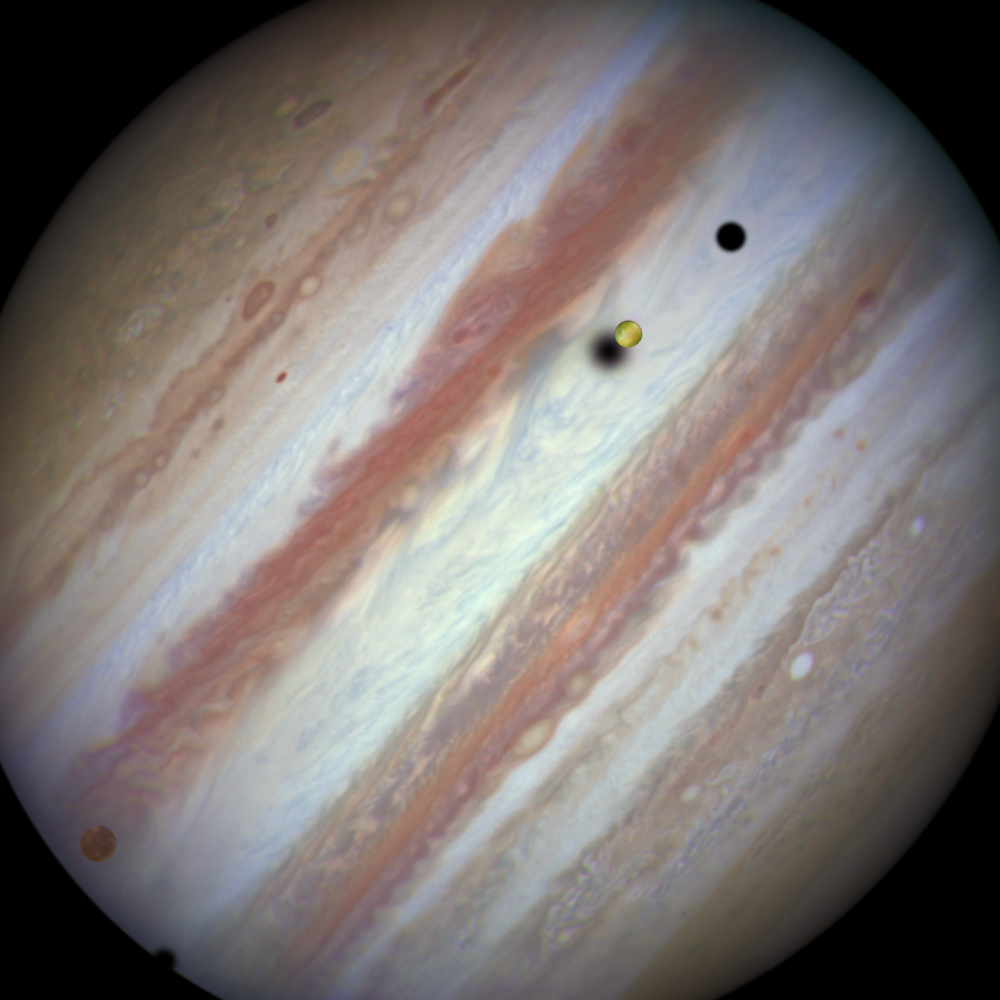

Three moons and their shadows parade across Jupiter — beginning of event

This new NASA/ESA Hubble Space Telescope image captures a rare occurrence as three of Jupiter’s largest moons parade across the giant gas planet’s banded face.

The image shows the Hubble observation at the beginning of the event. On the left is the moon Callisto and on the right, Io. The shadows from Europa, which cannot be seen in the image, Callisto and Io are strung out from left to right.

The movement of the moons is shown in the video created from Hubble stills and an annotated version is also available.

Credit: NASA, ESA, Hubble Heritage Team